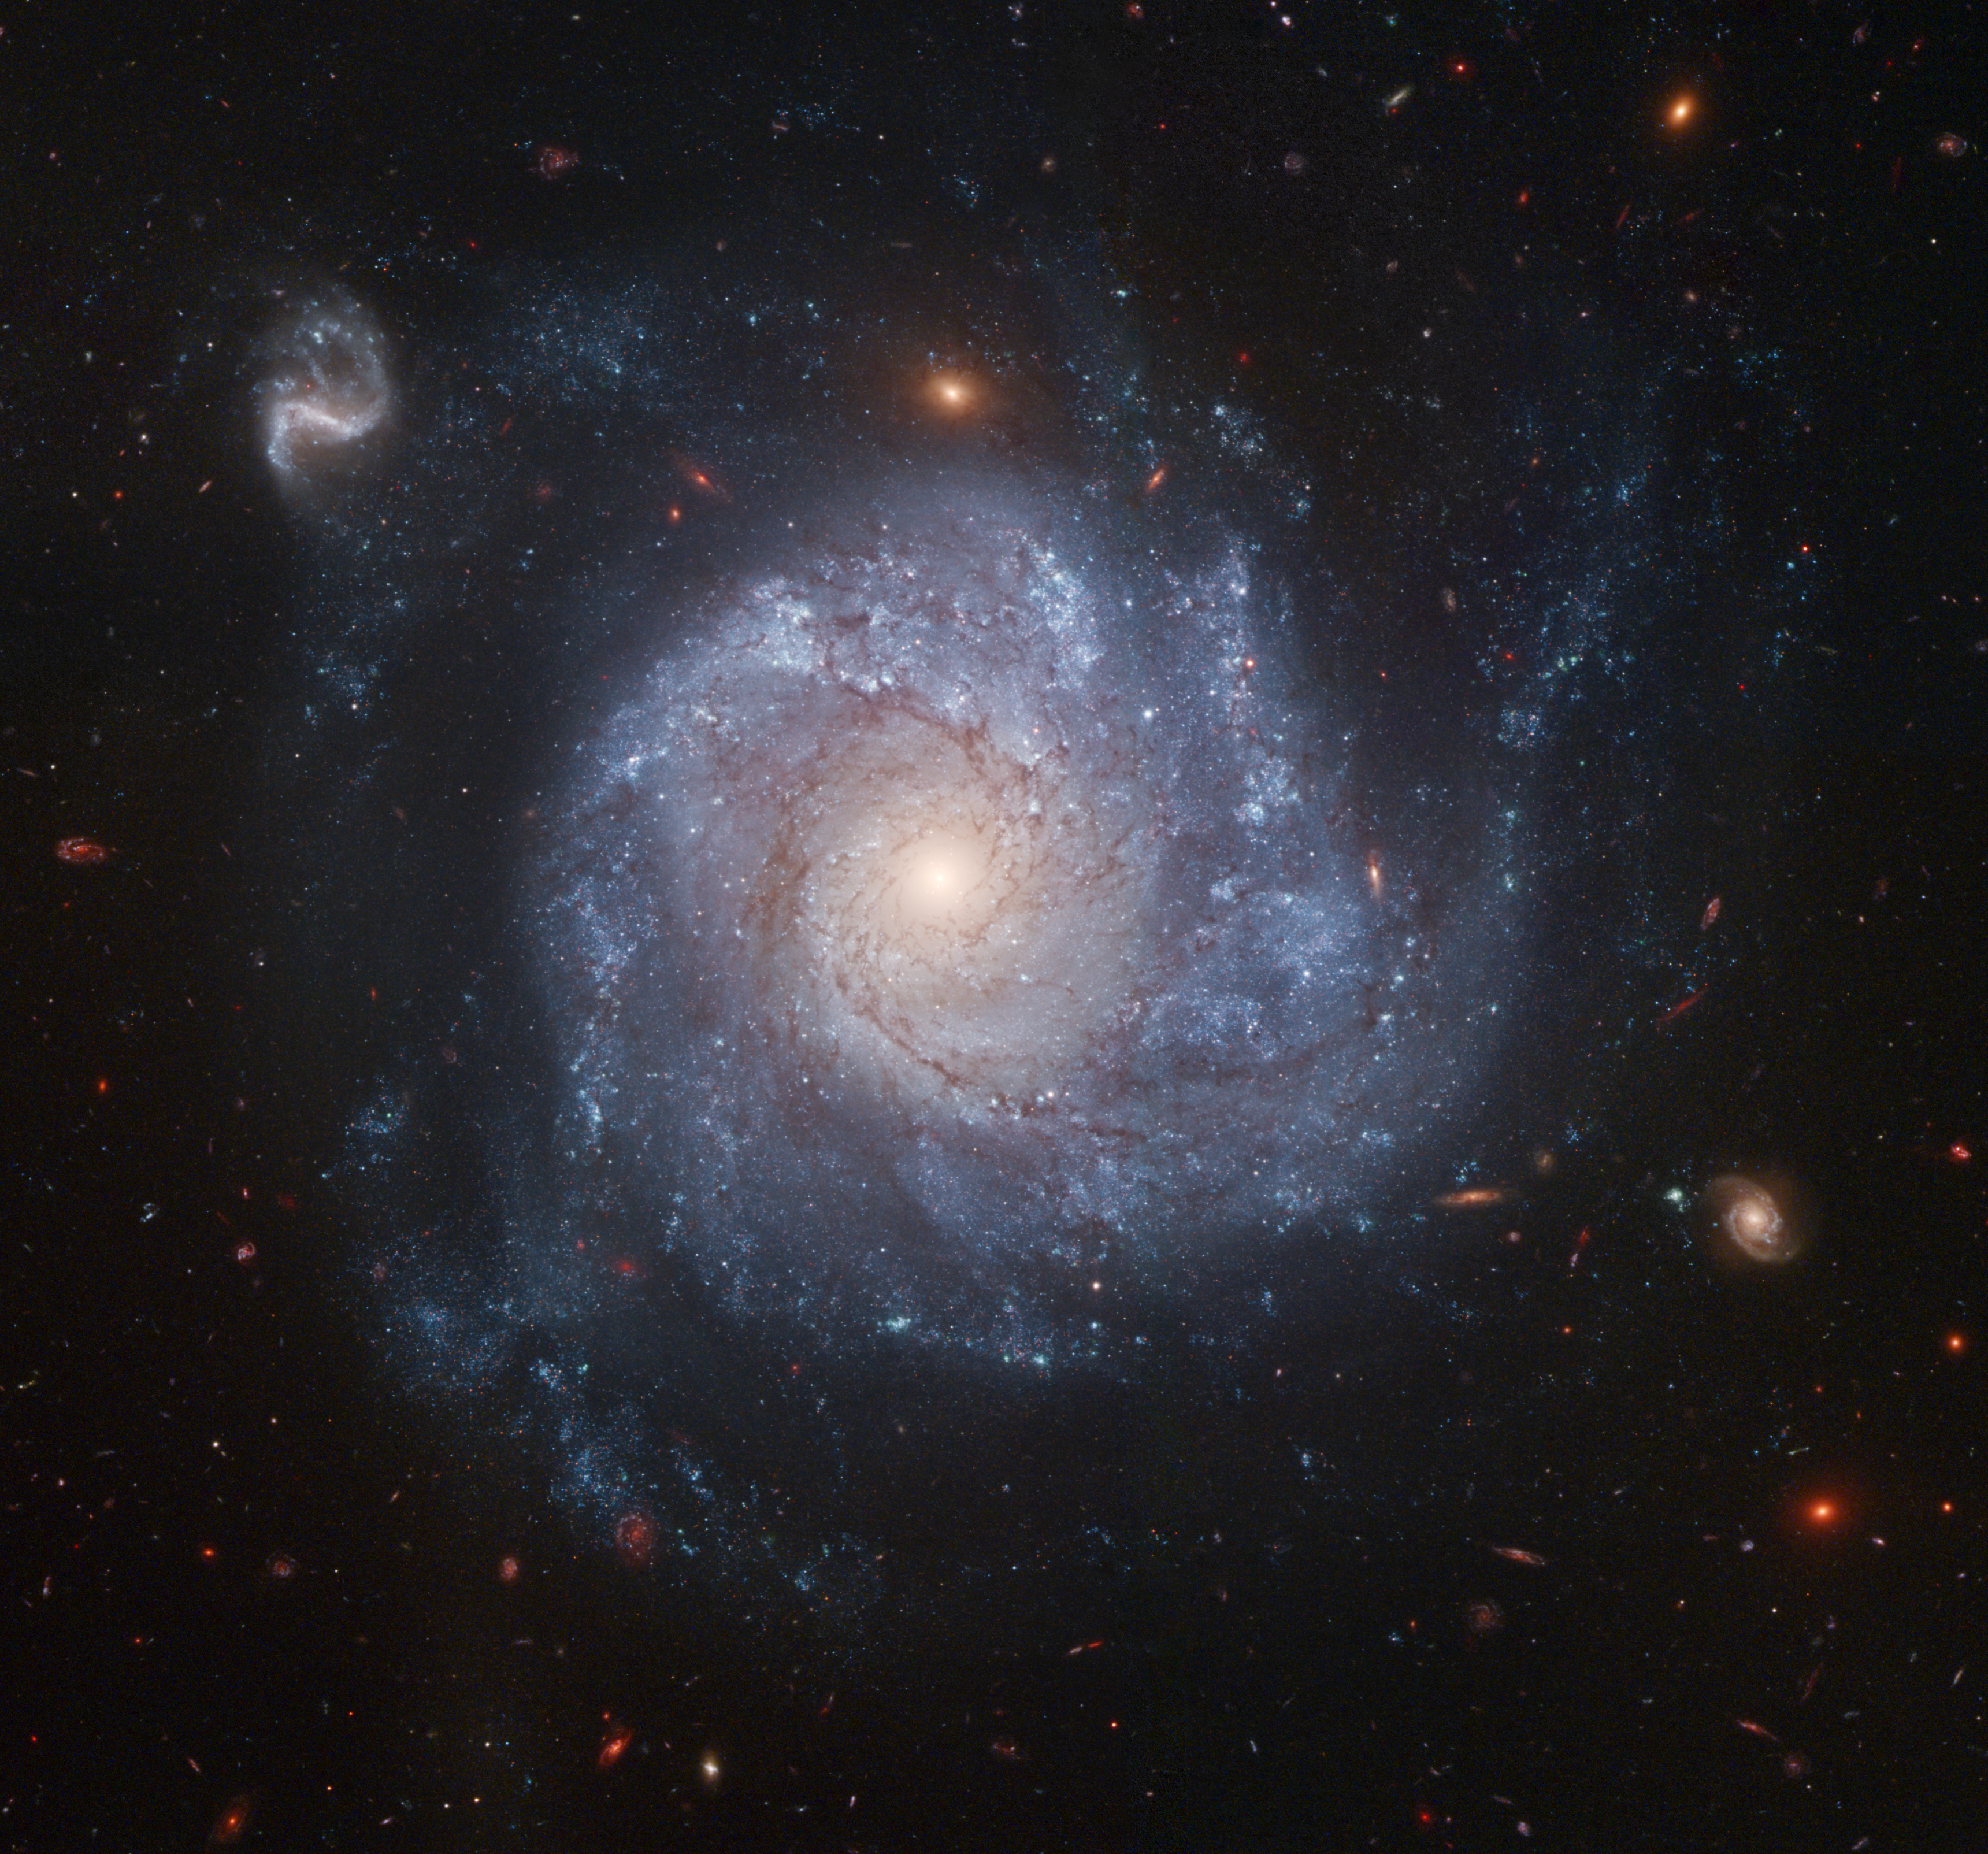

Hubble snaps images of a pinwheel-shaped galaxy

This dramatic spiral galaxy is one of the latest viewed by NASA/ESA Hubble Space Telescope. Stunning details of the face-on spiral galaxy, cataloged as NGC 1309, are captured in this colour image. NGC 1309 was home to supernova SN 2002fk, whose light reached Earth in September 2002. NGC 1309 resides 100 million light-years (30 Megaparsecs) from Earth. It is one of about 200 galaxies that make up the Eridanus group of galaxies.

Credit: NASA, ESA, The Hubble Heritage Team, (STScI/AURA) and A. Riess (STScI)